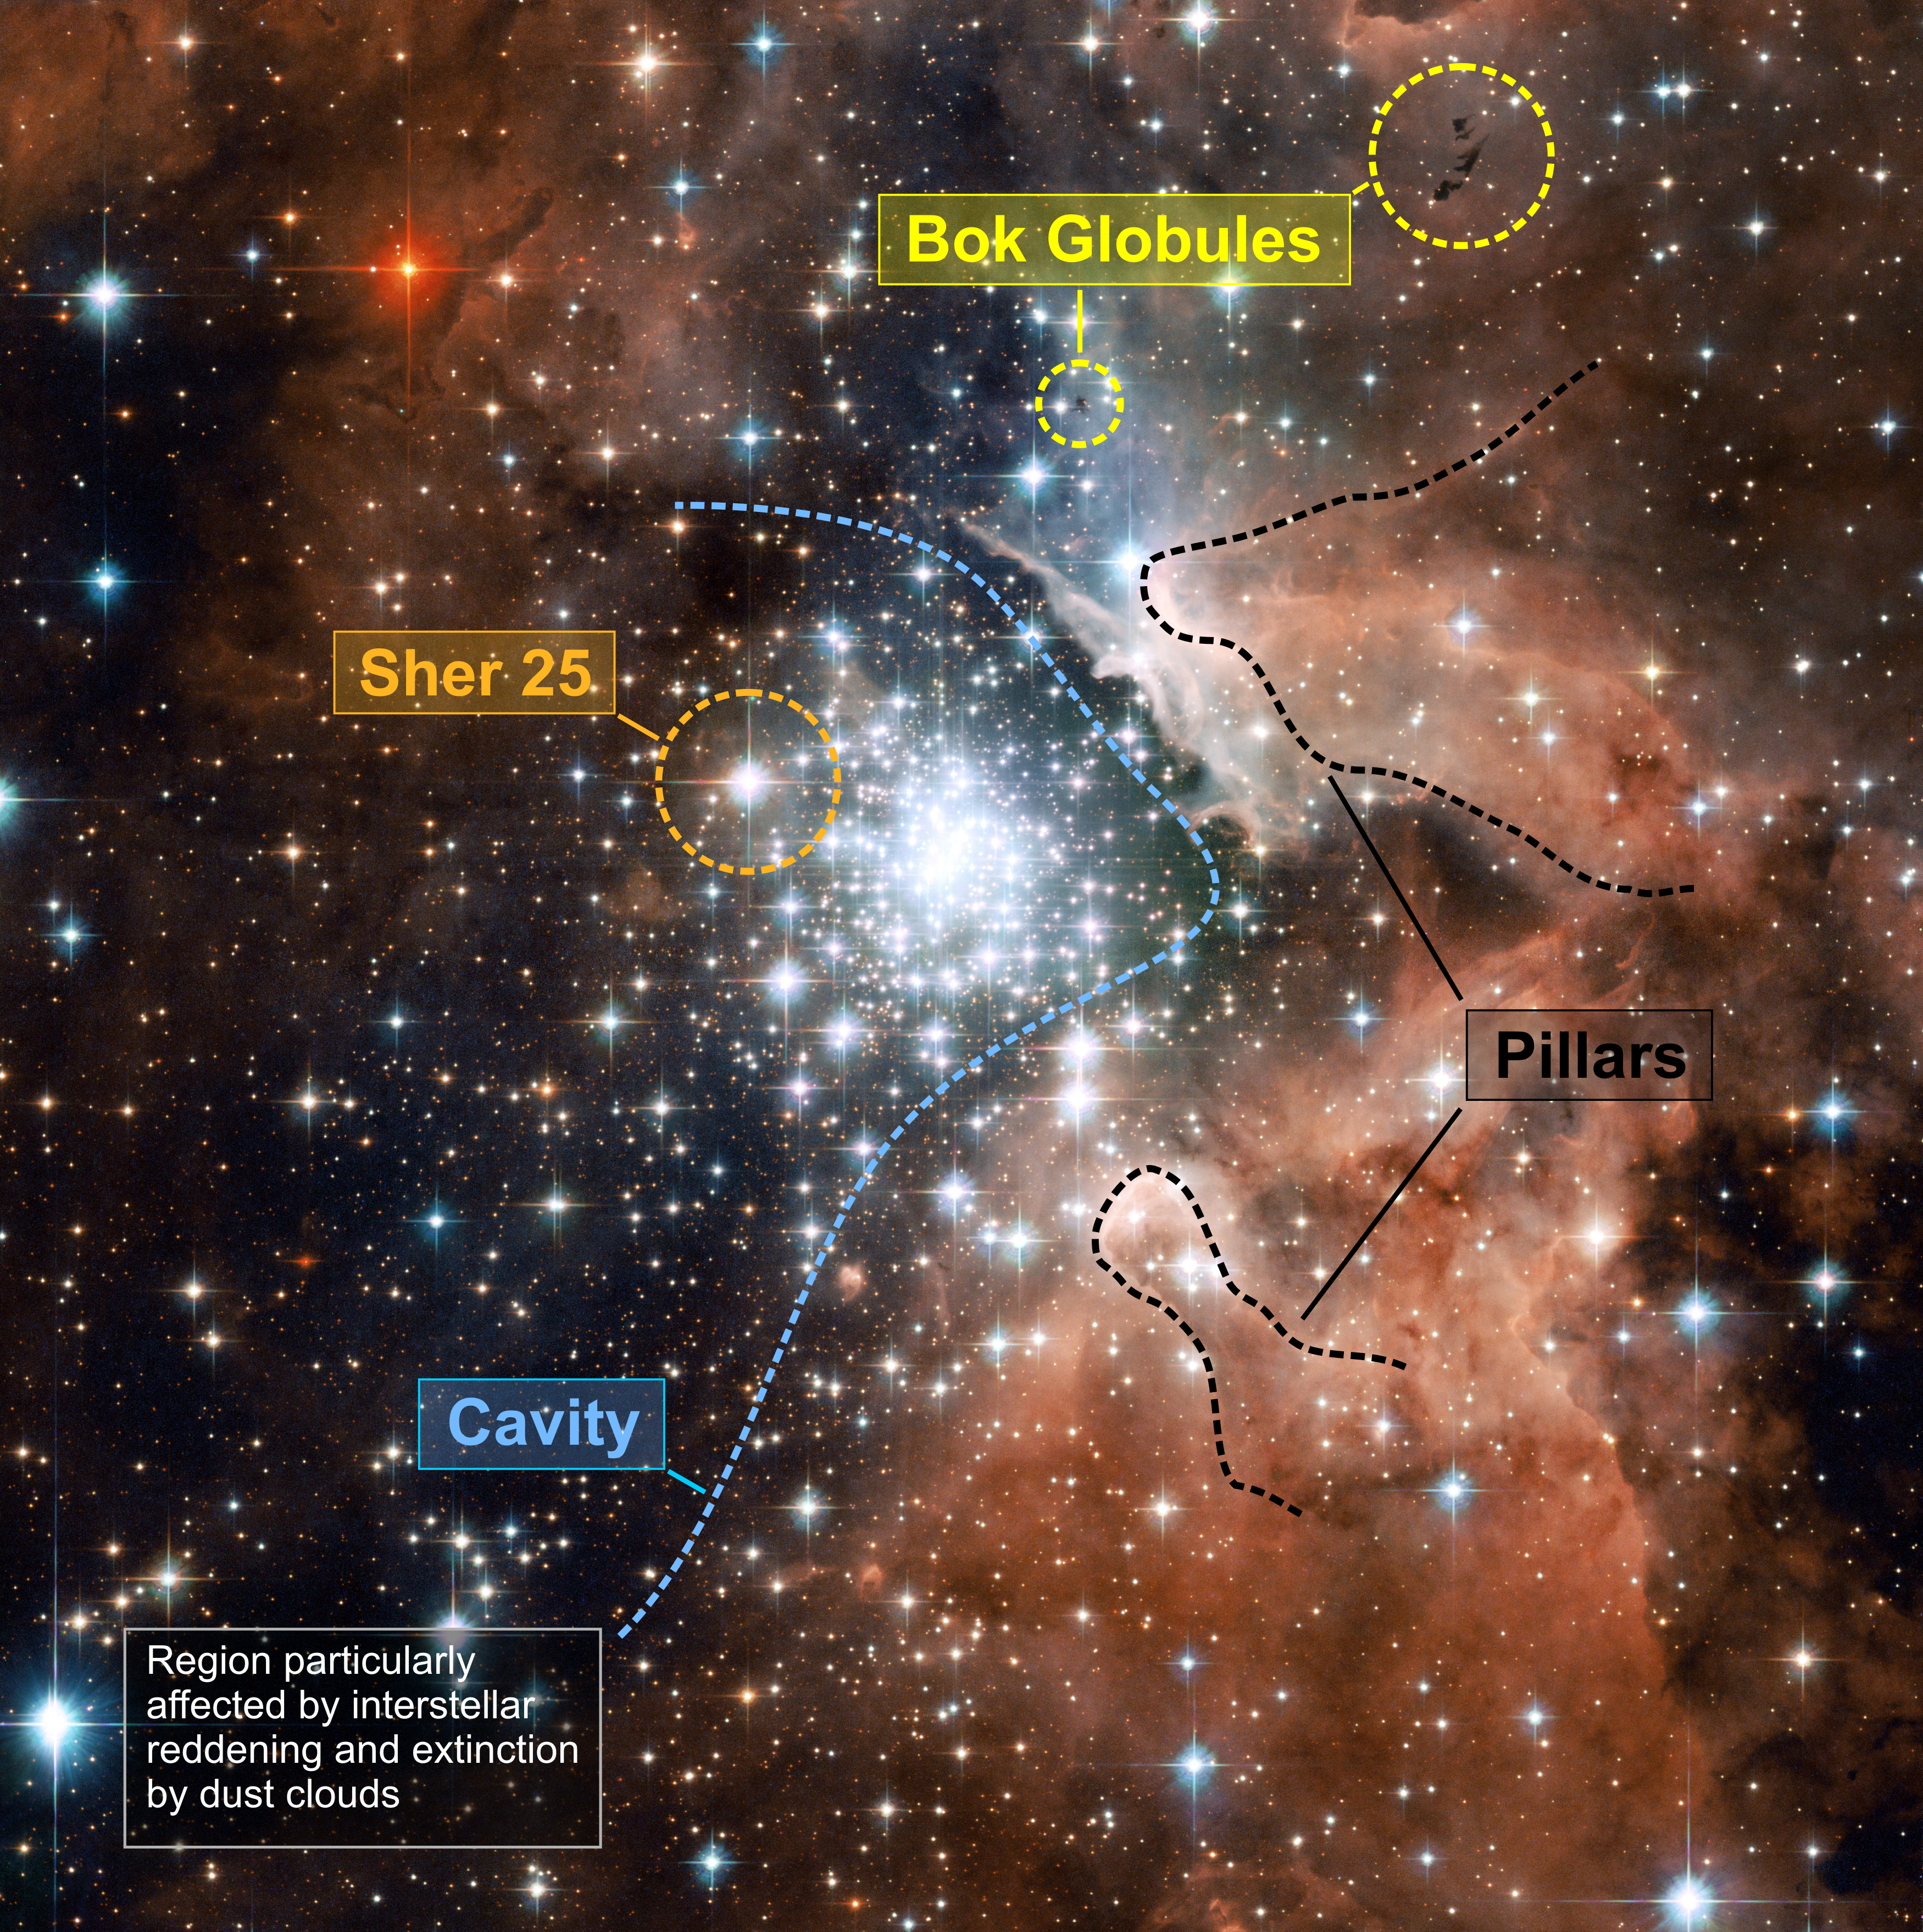

Extreme star cluster bursts into life in new Hubble image

An annotated version of the above Hubble image. The enormous cavity blown out by the young stars in the massive star cluster in NGC 3603's centre can be seen to the right of the cluster. Of particular interest is the lower left of the image. This is darker due to a mix of extinction of starlight and interstellar reddening caused by foreground dust clouds. Giant pillars of gas can also be seen extending away from the central cluster whilst the striking Bok Globules reside, silhouetted against the nebula, at the top right of the image.

Credit: NASA, ESA and the Hubble Heritage (STScI/AURA)-ESA/Hubble Collaboration